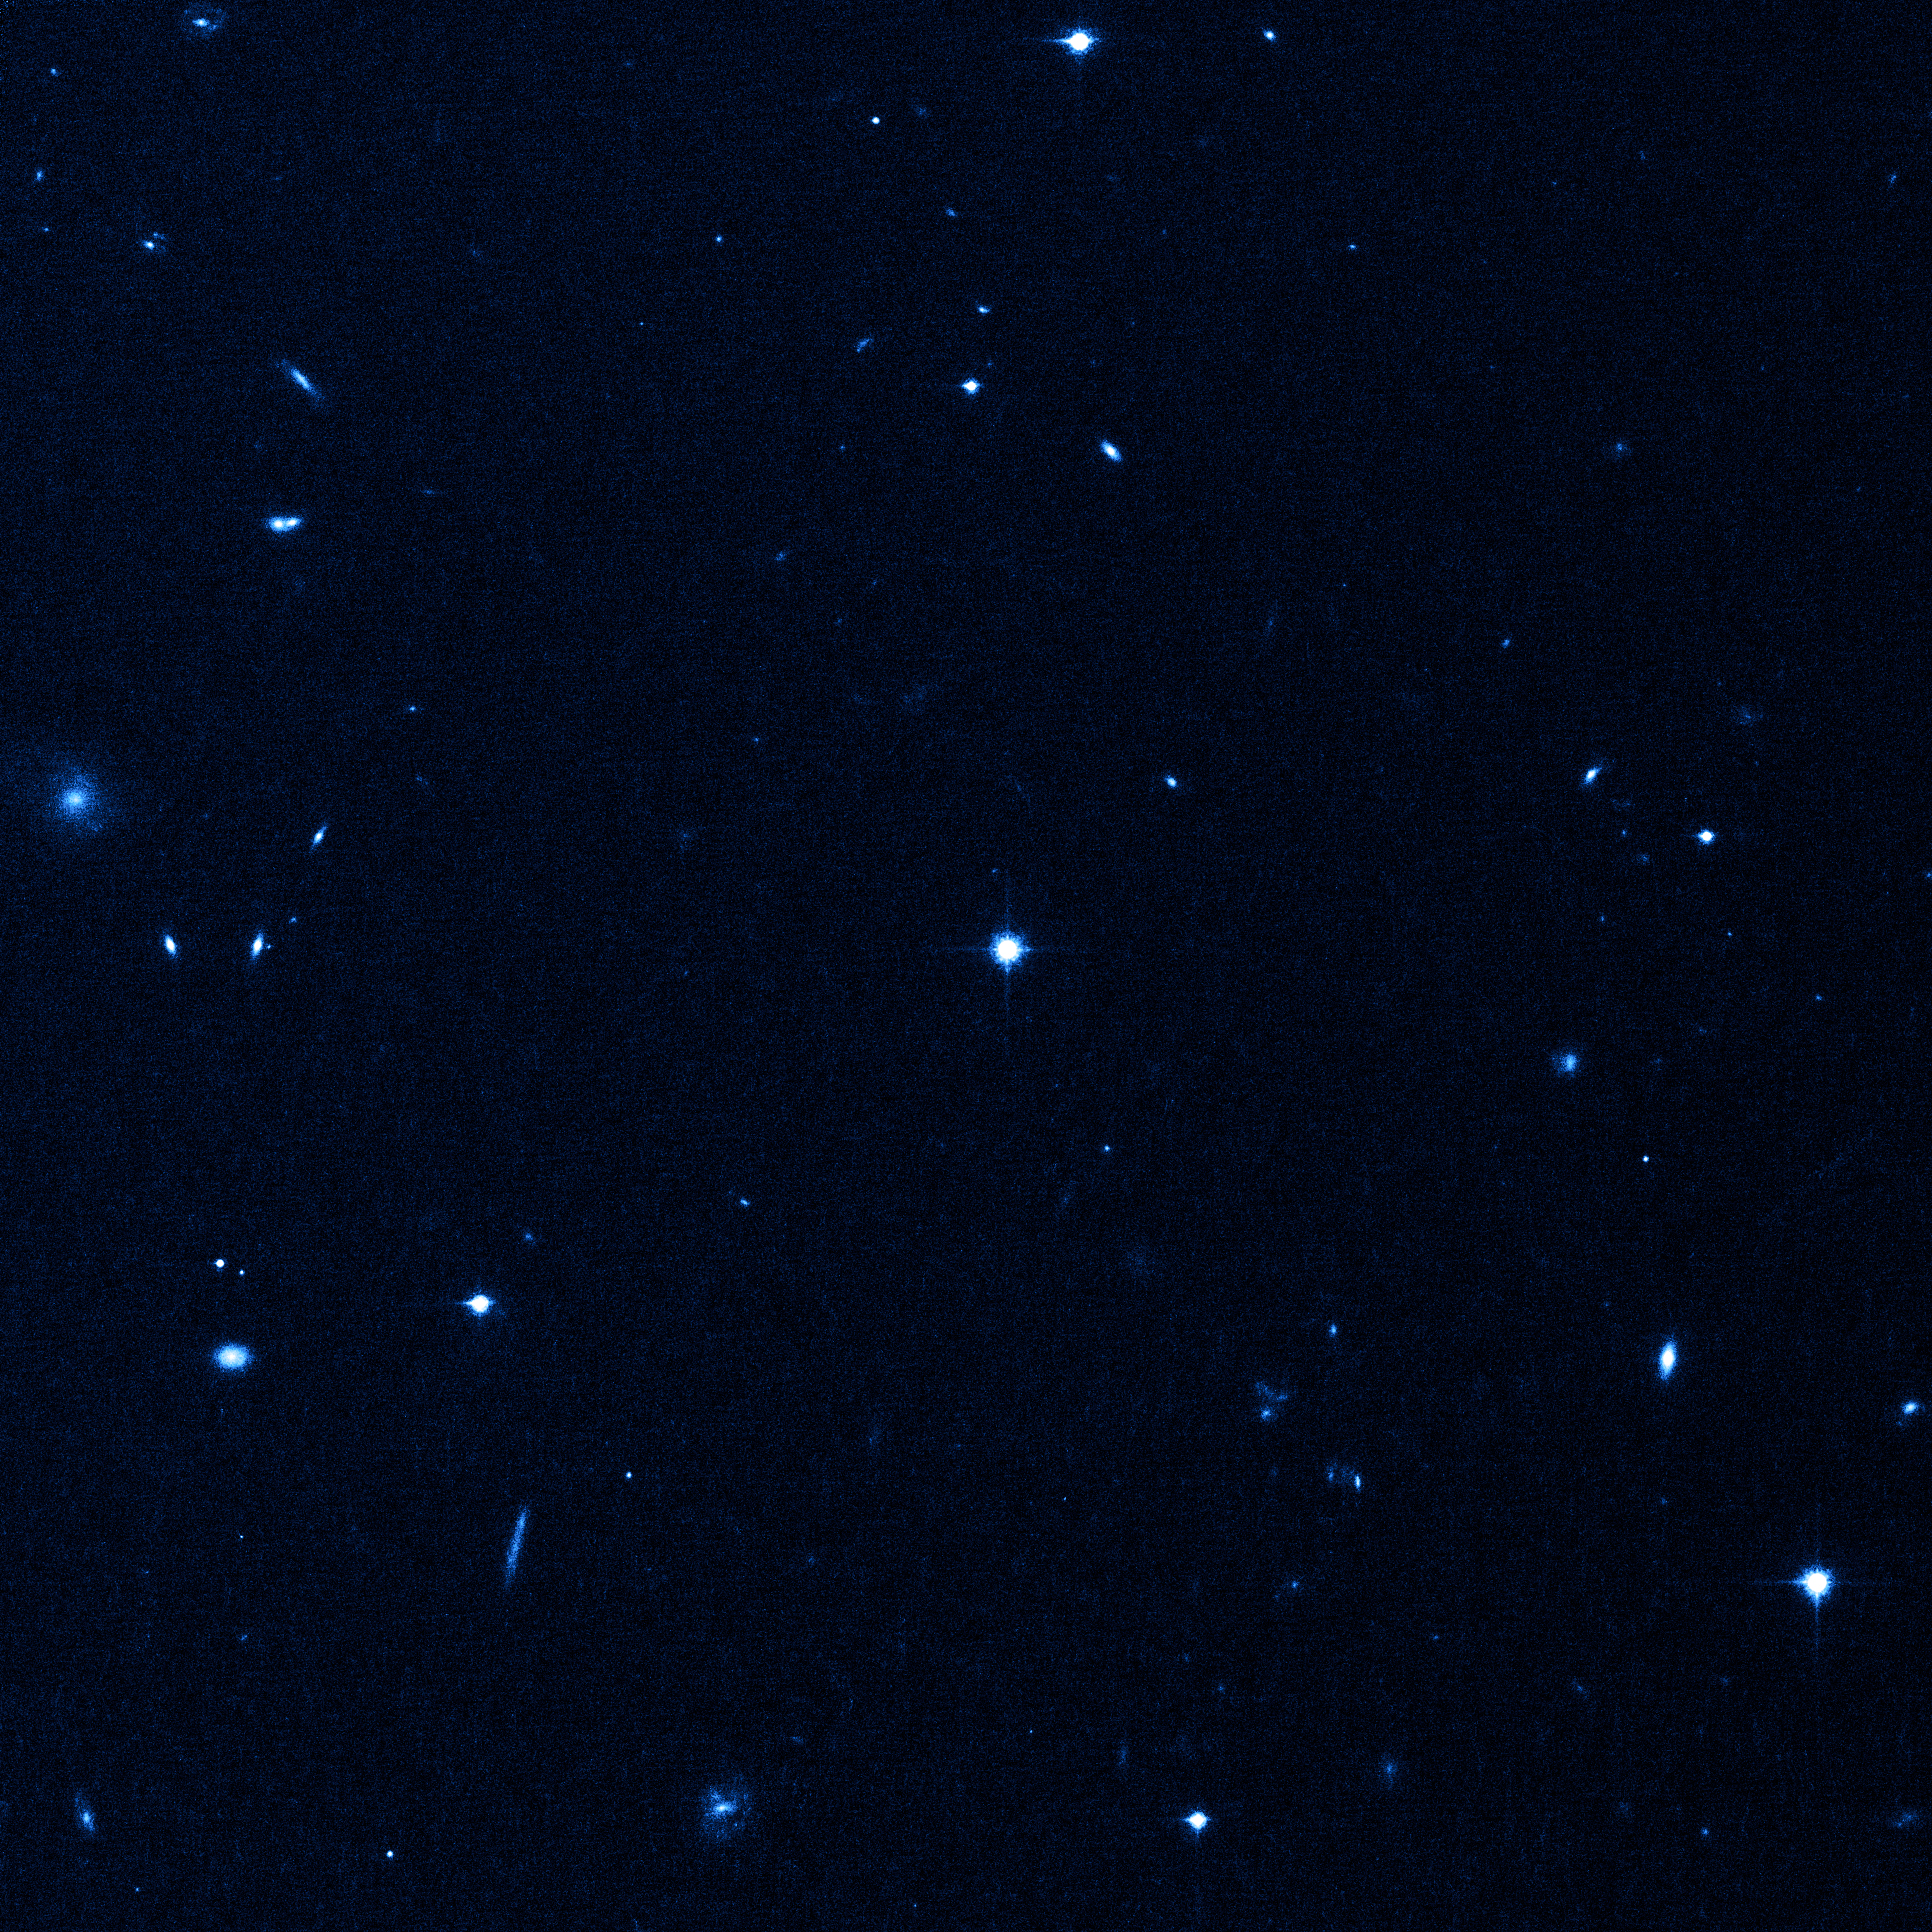

A speeding star is caught on Hubble's camera

This NASA/ESA Hubble Space Telescope image shows the hypervelocity star that was kicked out of the centre of our Milky Way galaxy with enough energy to escape the galaxy's gravitational grip. Dubbed HE 0437-5439, the stellar speedster may have been a member of a triple-star system and was jettisoned from the galaxy by the monster central black hole.

Galaxies in this image provide a grid of landmarks, which astronomers used to measure the full speed of this stellar outcast over 3 1/2 years. The stellar outcast is rocketing through the Milky Way's distant outskirts at 2.6 million kilometres per hour, high above the galaxy's disk, about 200,000 light-years from the centre. The star is destined to roam the empty depths of intergalactic space.

Based on the speed and position of HE 0437-5439, the star would need 100 million years to have journeyed from the Milky Way's core. Yet its mass — nine times that of our Sun — and blue colour mean that it should have burned out after only 20 million years — far shorter than the transit time it took to get to its current location. The most likely explanation for this paradox is that the star is a blue straggler, a pair of smaller and longer-lived stars that merged during flight.

Hubble's Advanced Camera for Surveys made this observation on 8 July 2006, in near-infrared light.

Credit: NASA, ESA, O. Gnedin (University of Michigan, Ann Arbor, USA), and W. Brown (Harvard-Smithsonian Center for Astrophysics, Cambridge, Mass., USA)